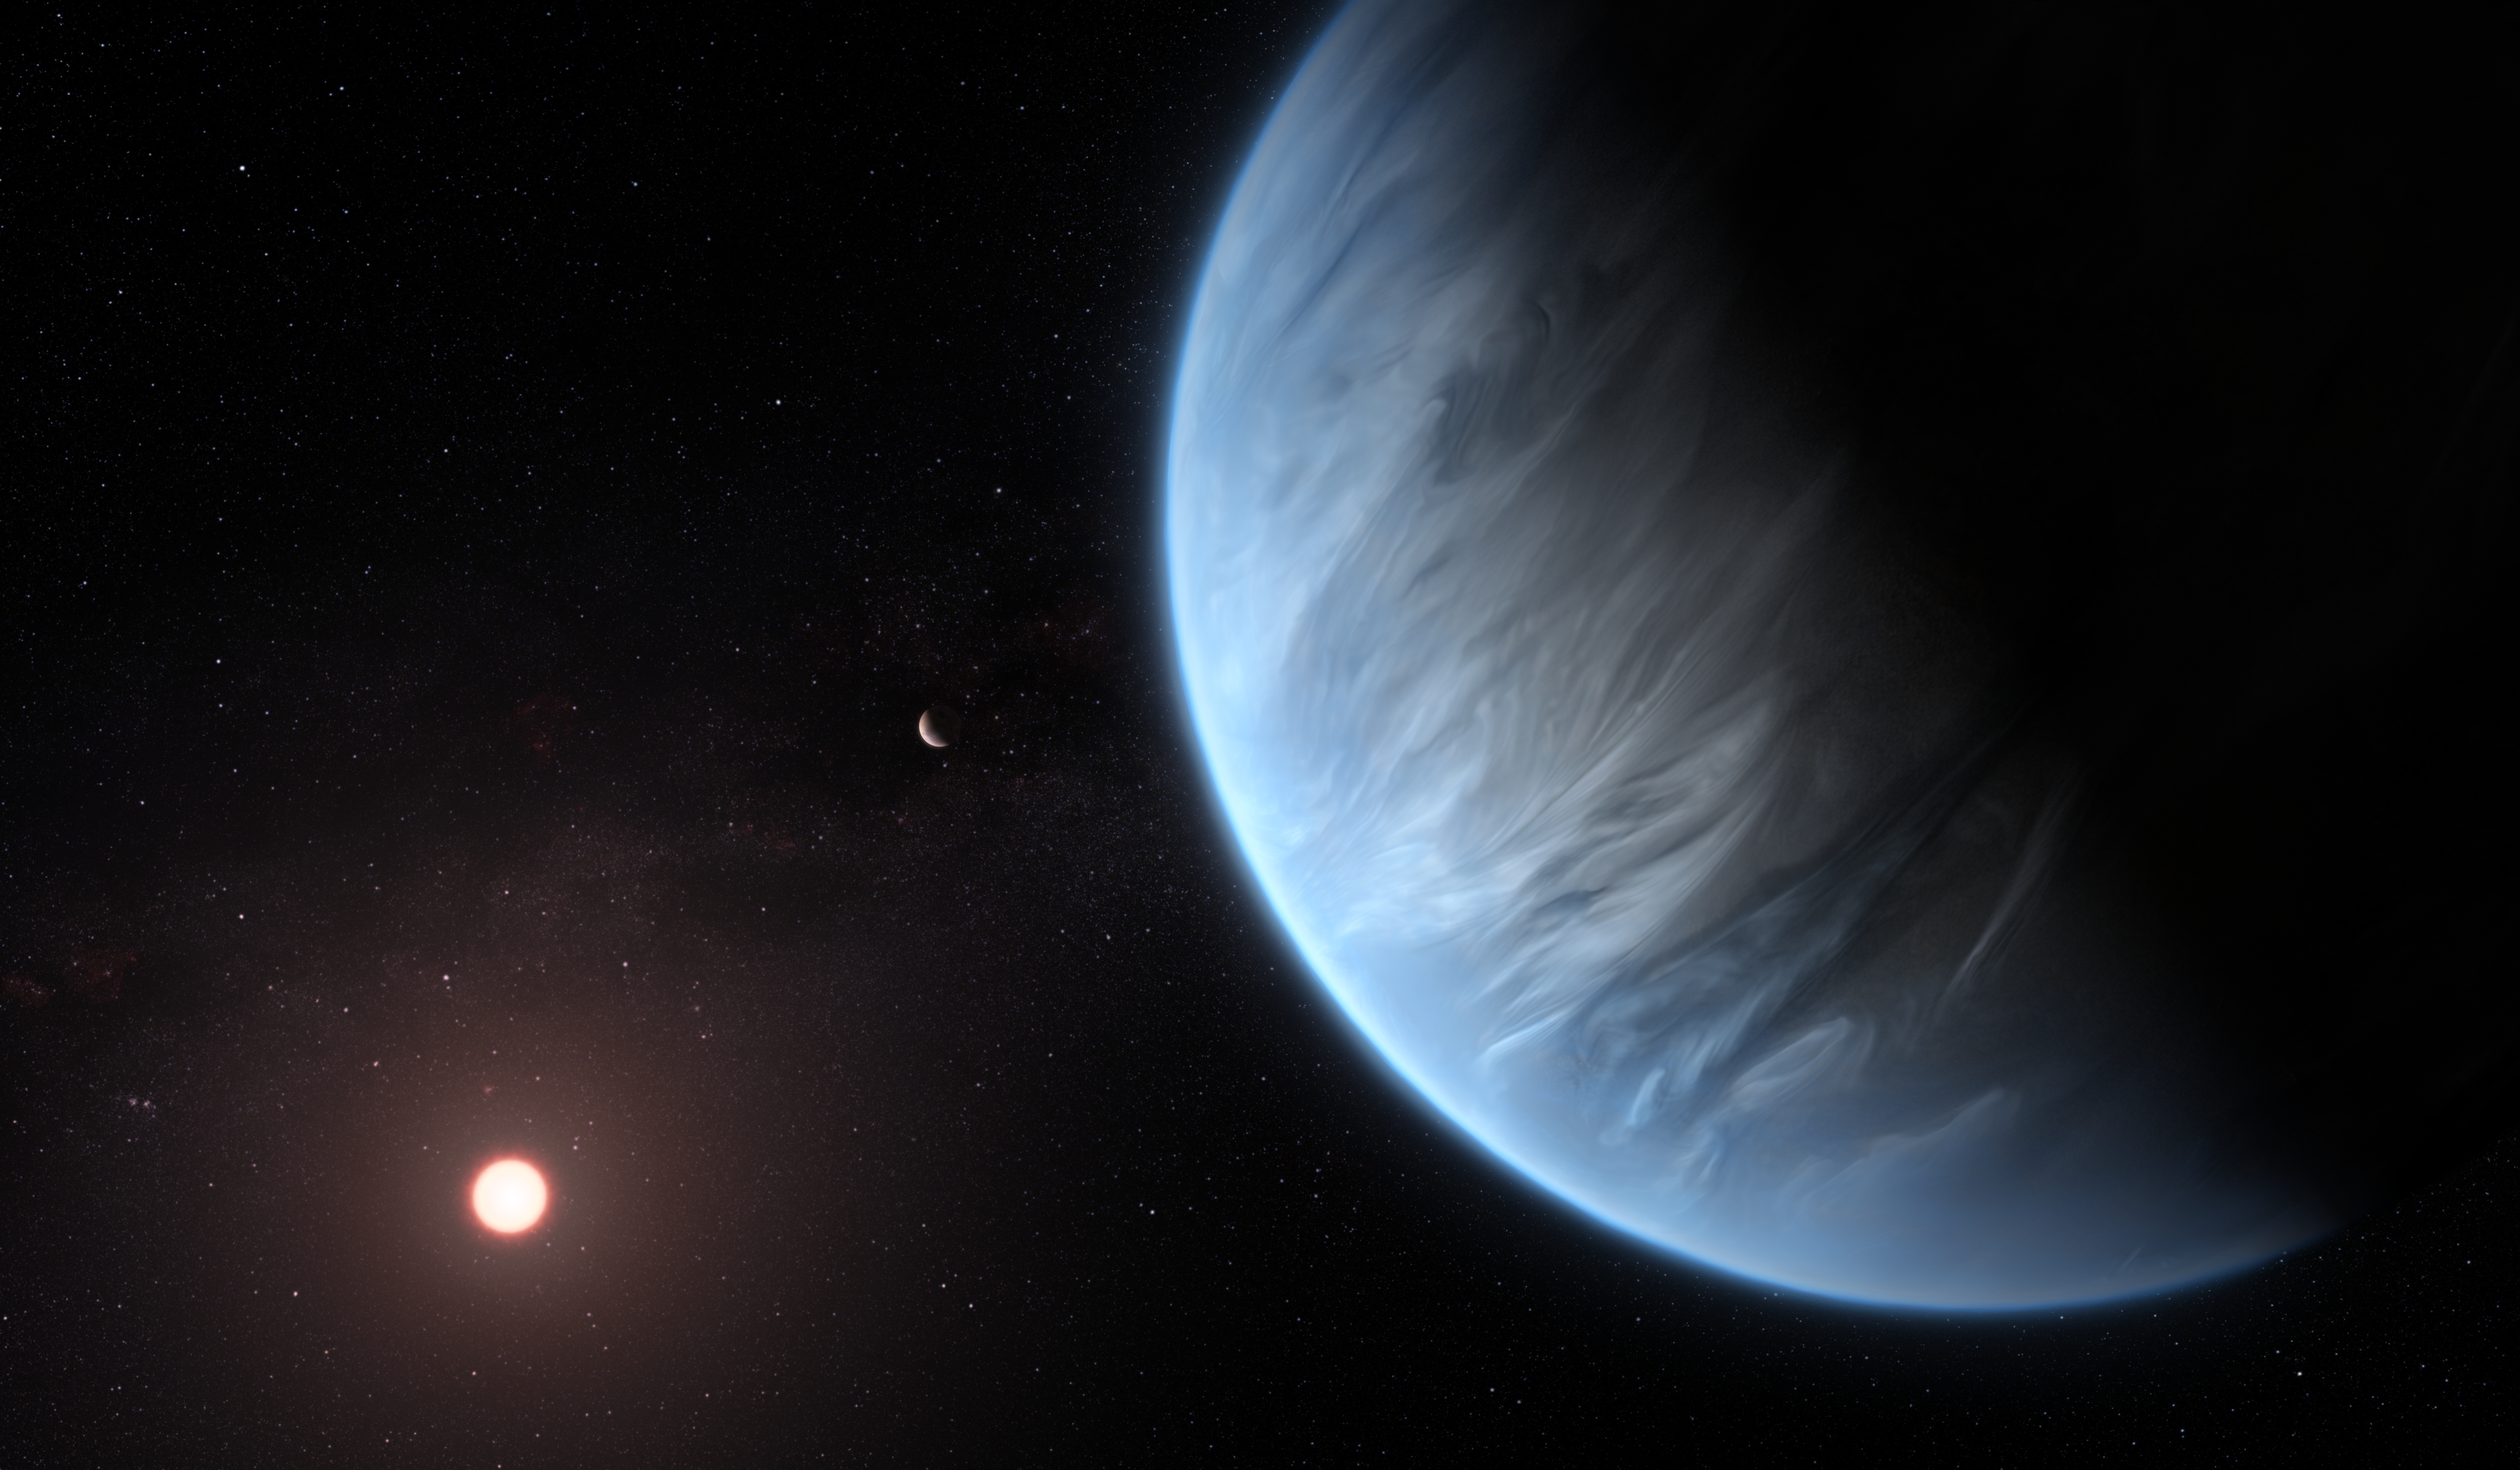

Exoplanet K2-18b (Artist’s Impression)

This artist’s impression shows the planet K2-18b, it’s host star and an accompanying planet in this system. K2-18b is now the only super-Earth exoplanet known to host both water and temperatures that could support life.

UCL researchers used archive data from 2016 and 2017 captured by the NASA/ESA Hubble Space Telescope and developed open-source algorithms to analyse the starlight filtered through K2-18b’s atmosphere. The results revealed the molecular signature of water vapour, also indicating the presence of hydrogen and helium in the planet’s atmosphere.

Credit: ESA/Hubble, M. Kornmesser